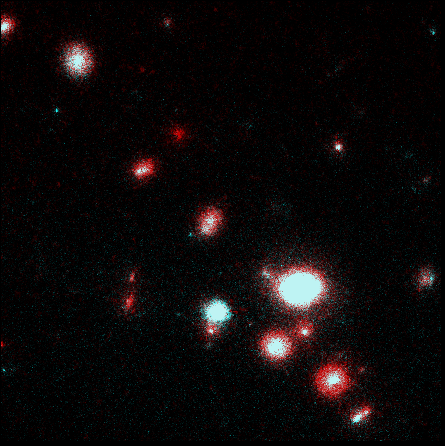

Medium deep survey

This is a Hubble Space Telescope (HST) image of a field near the galaxy NGC 5548.

Credit: Richard Griffiths, The Johns Hopkins University and NASA/ESA